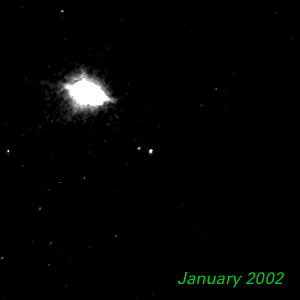

January 2002 - Kuiper Belt Object 1998 WW31

The Hubble Space Telescope is hot on the trail of a puzzling new class of solar system object that might be called a Pluto "mini-me." Together, these objects are 5,000 times less massive than Pluto and Charon. Like Pluto and Charon, these dim and fleeting objects travel in pairs in the frigid, mysterious outer realm of the solar system called the Kuiper Belt, a long-hypothesized "junkyard" of countless icy bodies left over from the solar system's formation. A total of seven binary Kuiper Belt objects have been seen so far by Hubble and ground-based observatories. Among them is a pair called 1998 WW31, which the Hubble telescope studied in detail.

Credit: NASA & ESA